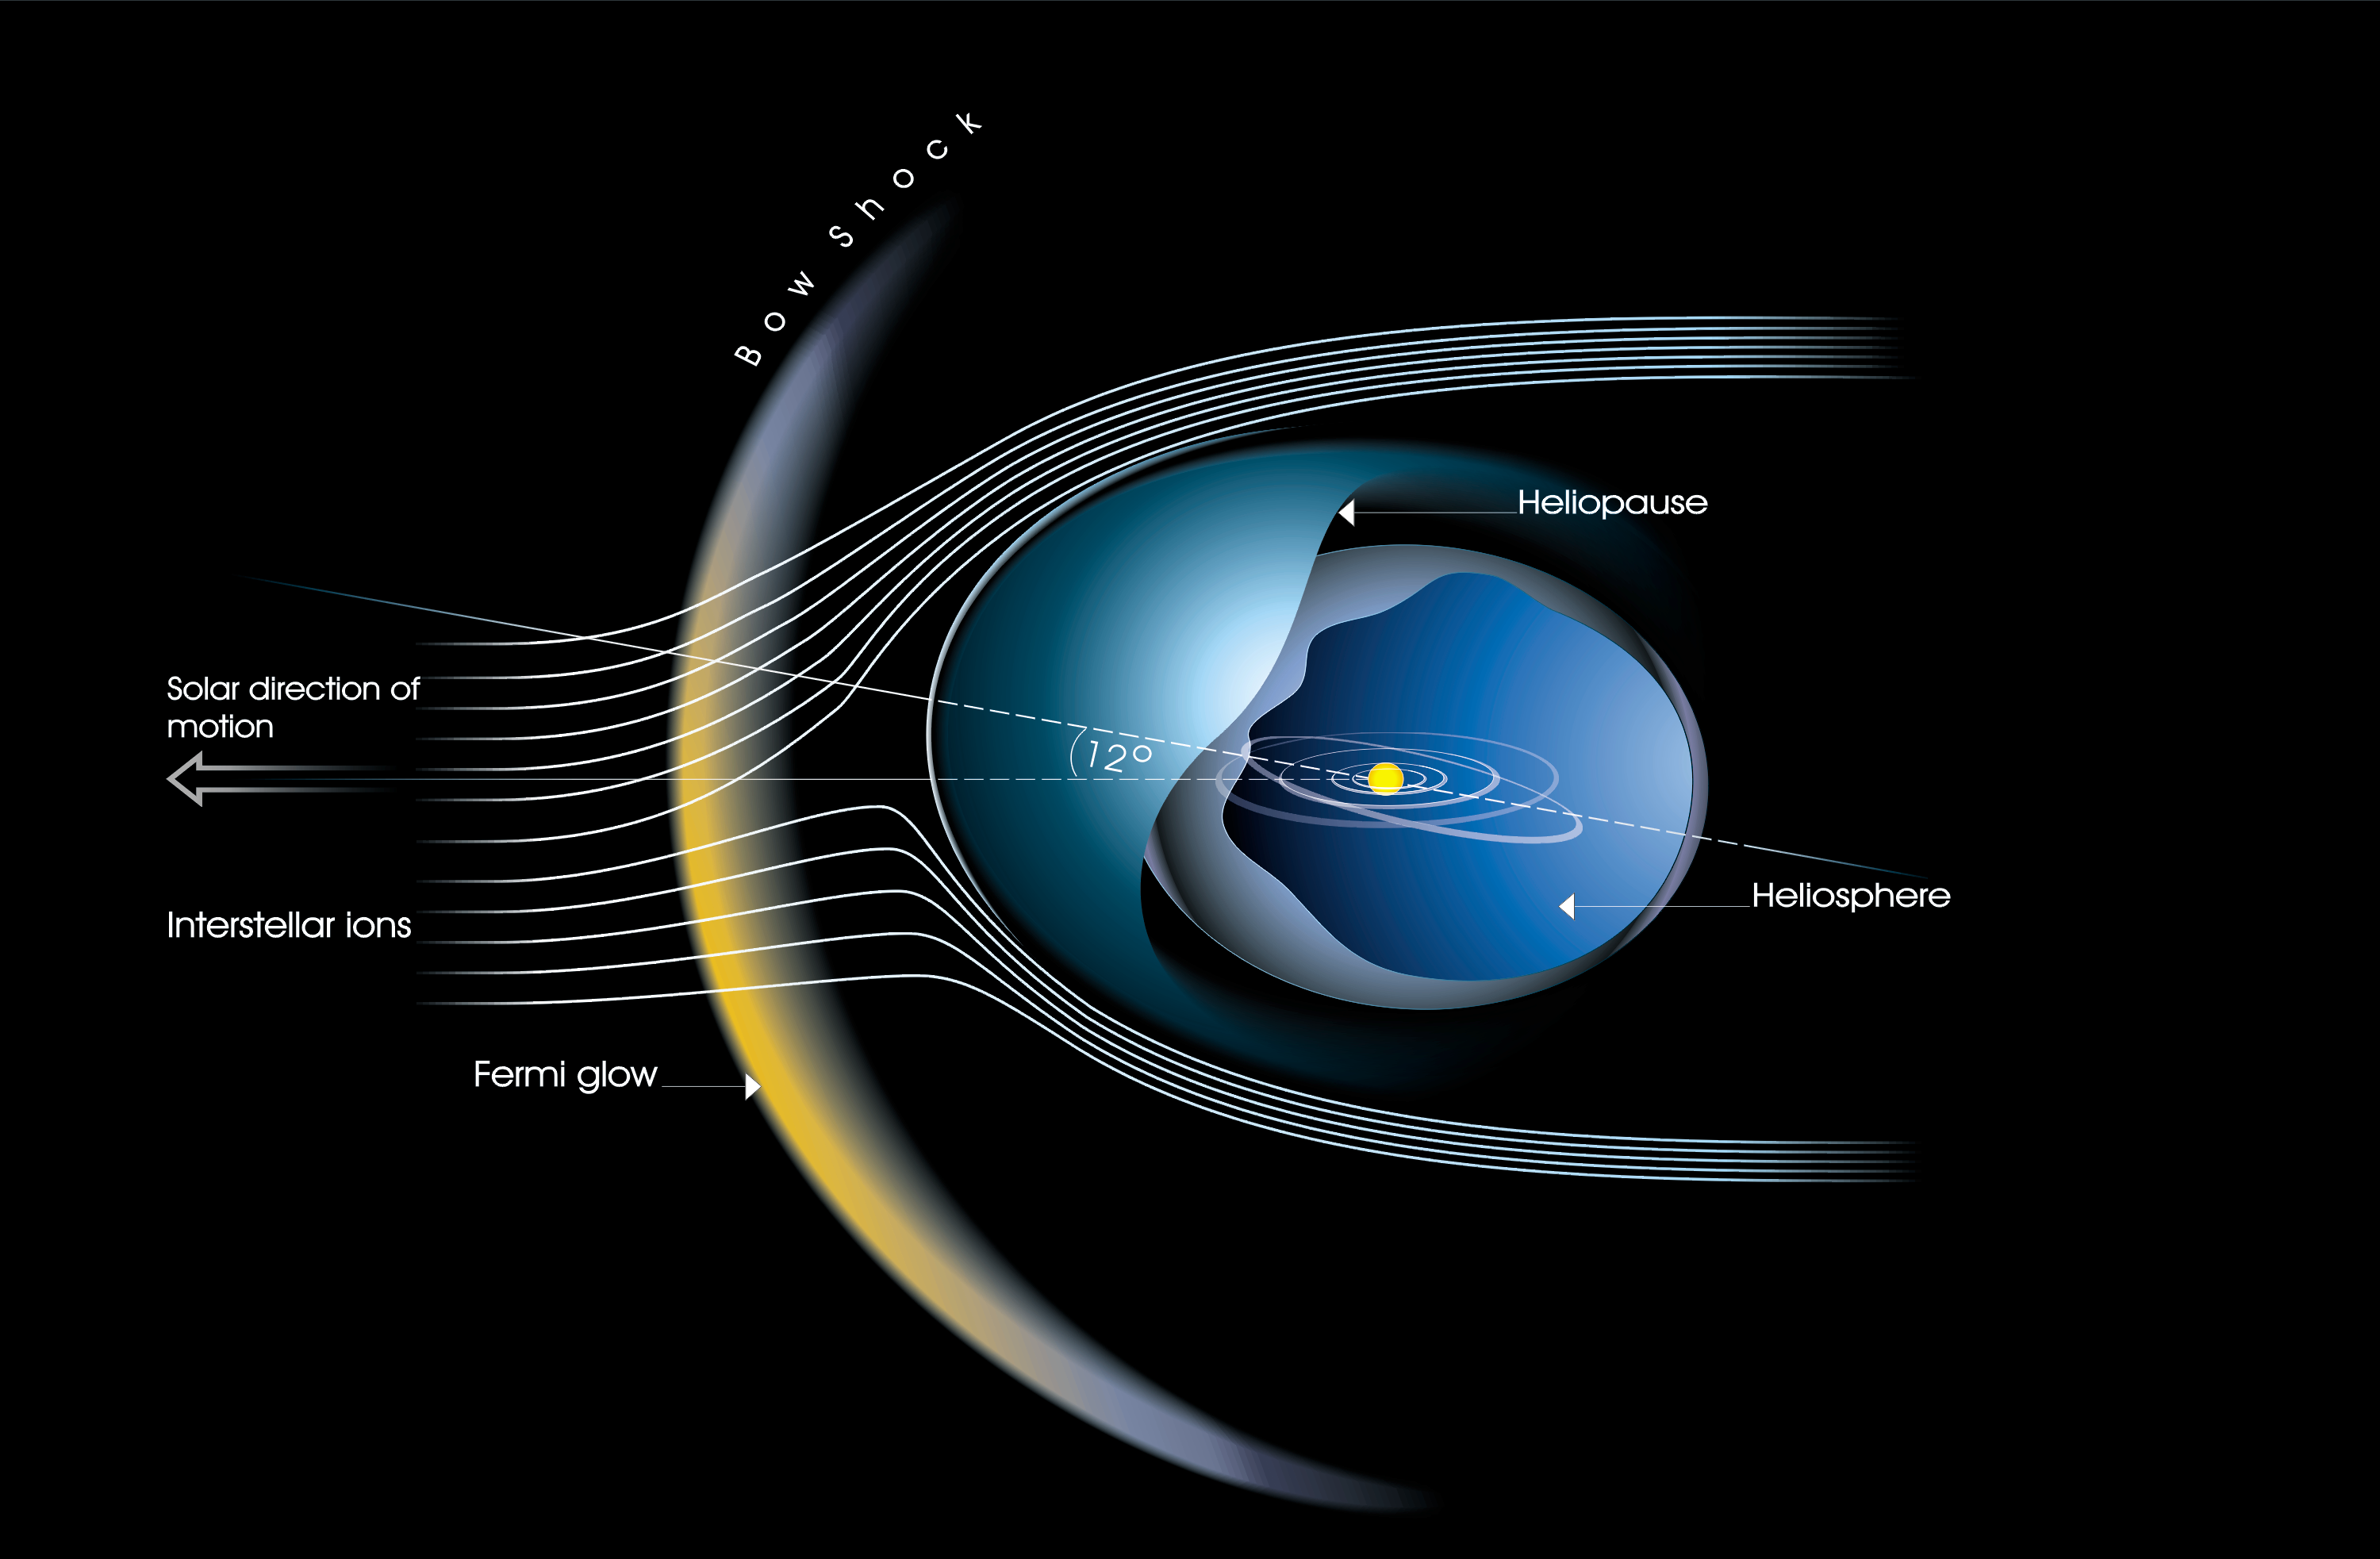

The heliosphere is tilted and the bow shock really exists (annotated version)

This artist's impression depicts the local region of space around the Solar System reflecting new discoveries by European scientists using observations from the Hubble Space Telescope and Voyager.

Credit: ESA & Lotfi Ben Jaffel (Institut d'Astrophysique de Paris (CNRS-INSU)), Martin Kornmesser and Lars Lindberg Christensen (Space Telescope-European Coordination Facility).